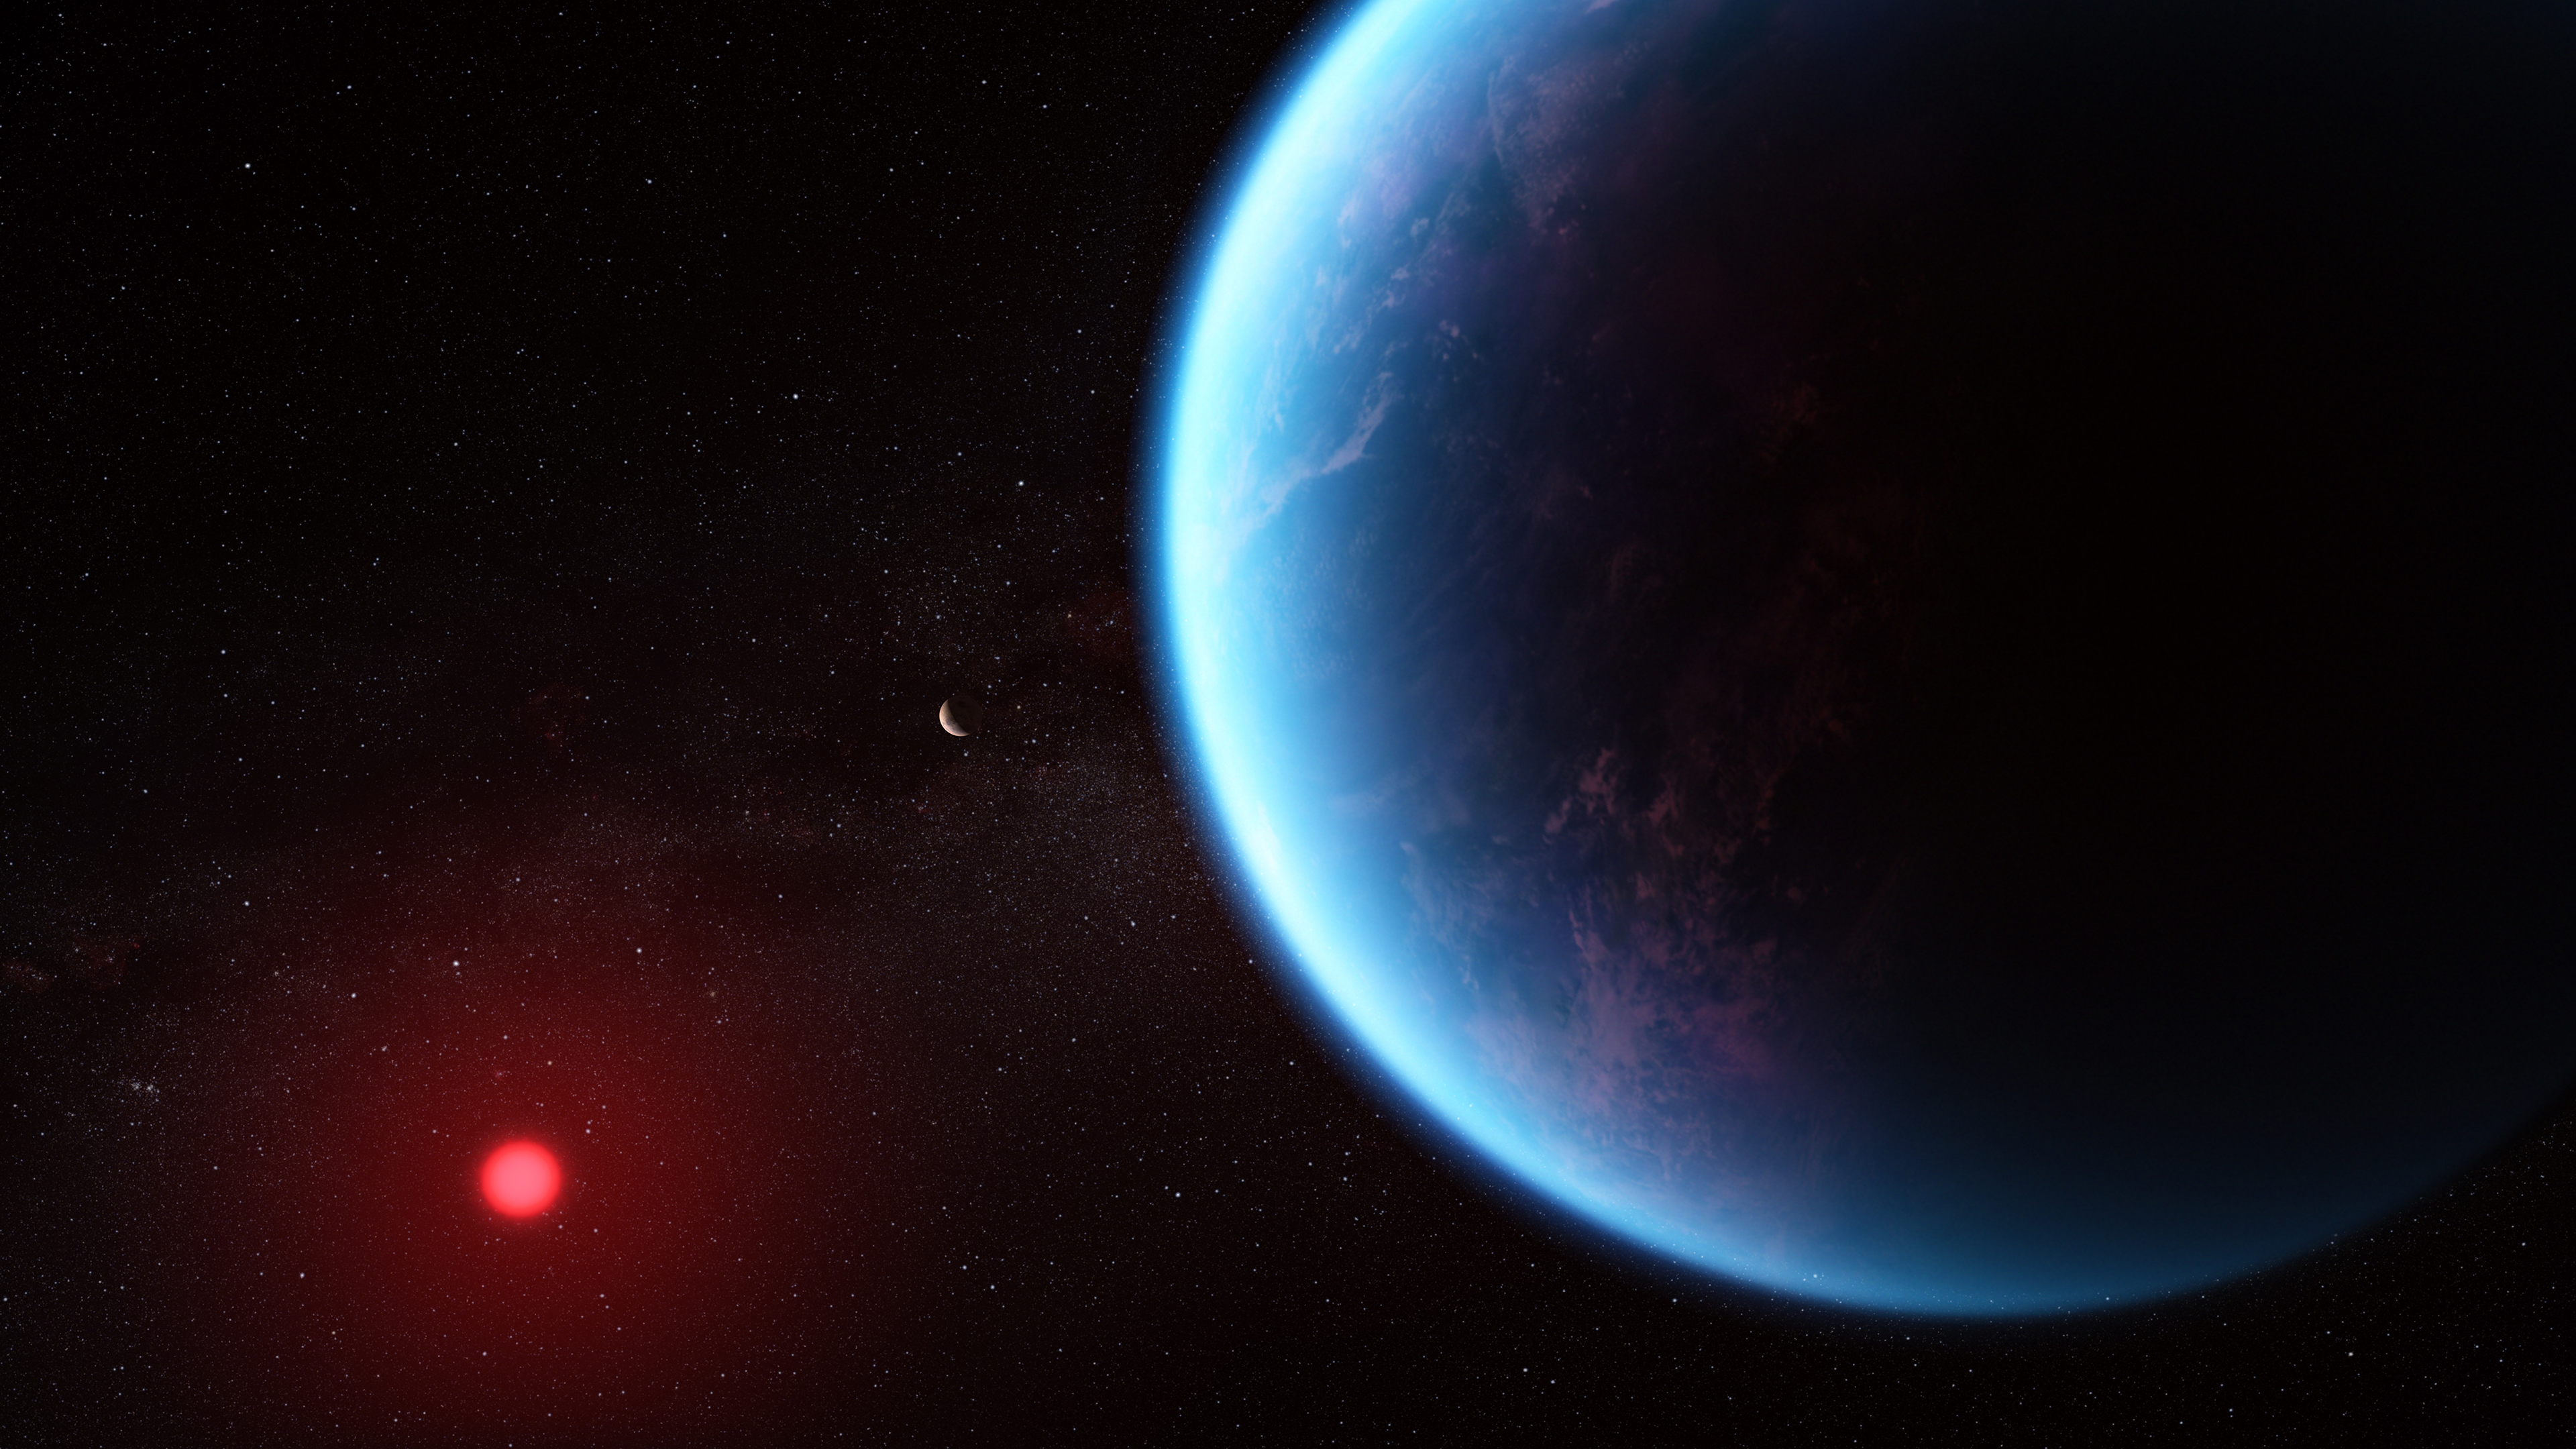

Exoplanet K2-18 b (illustration)

This artist’s concept shows what exoplanet K2-18 b could look like based on science data. K2-18 b, an exoplanet 8.6 times as massive as Earth, orbits the cool dwarf star K2-18 in the habitable zone and lies 120 light-years from Earth. A new investigation with the NASA/ESA/CSA James Webb Space Telescope into K2-18 b has revealed the presence of carbon-bearing molecules including methane and carbon dioxide. The abundance of methane and carbon dioxide, and shortage of ammonia, support the hypothesis that there may be an ocean underneath a hydrogen-rich atmosphere in K2-18 b.

Credit: NASA, CSA, ESA, J. Olmstead (STScI), N. Madhusudhan (Cambridge University)